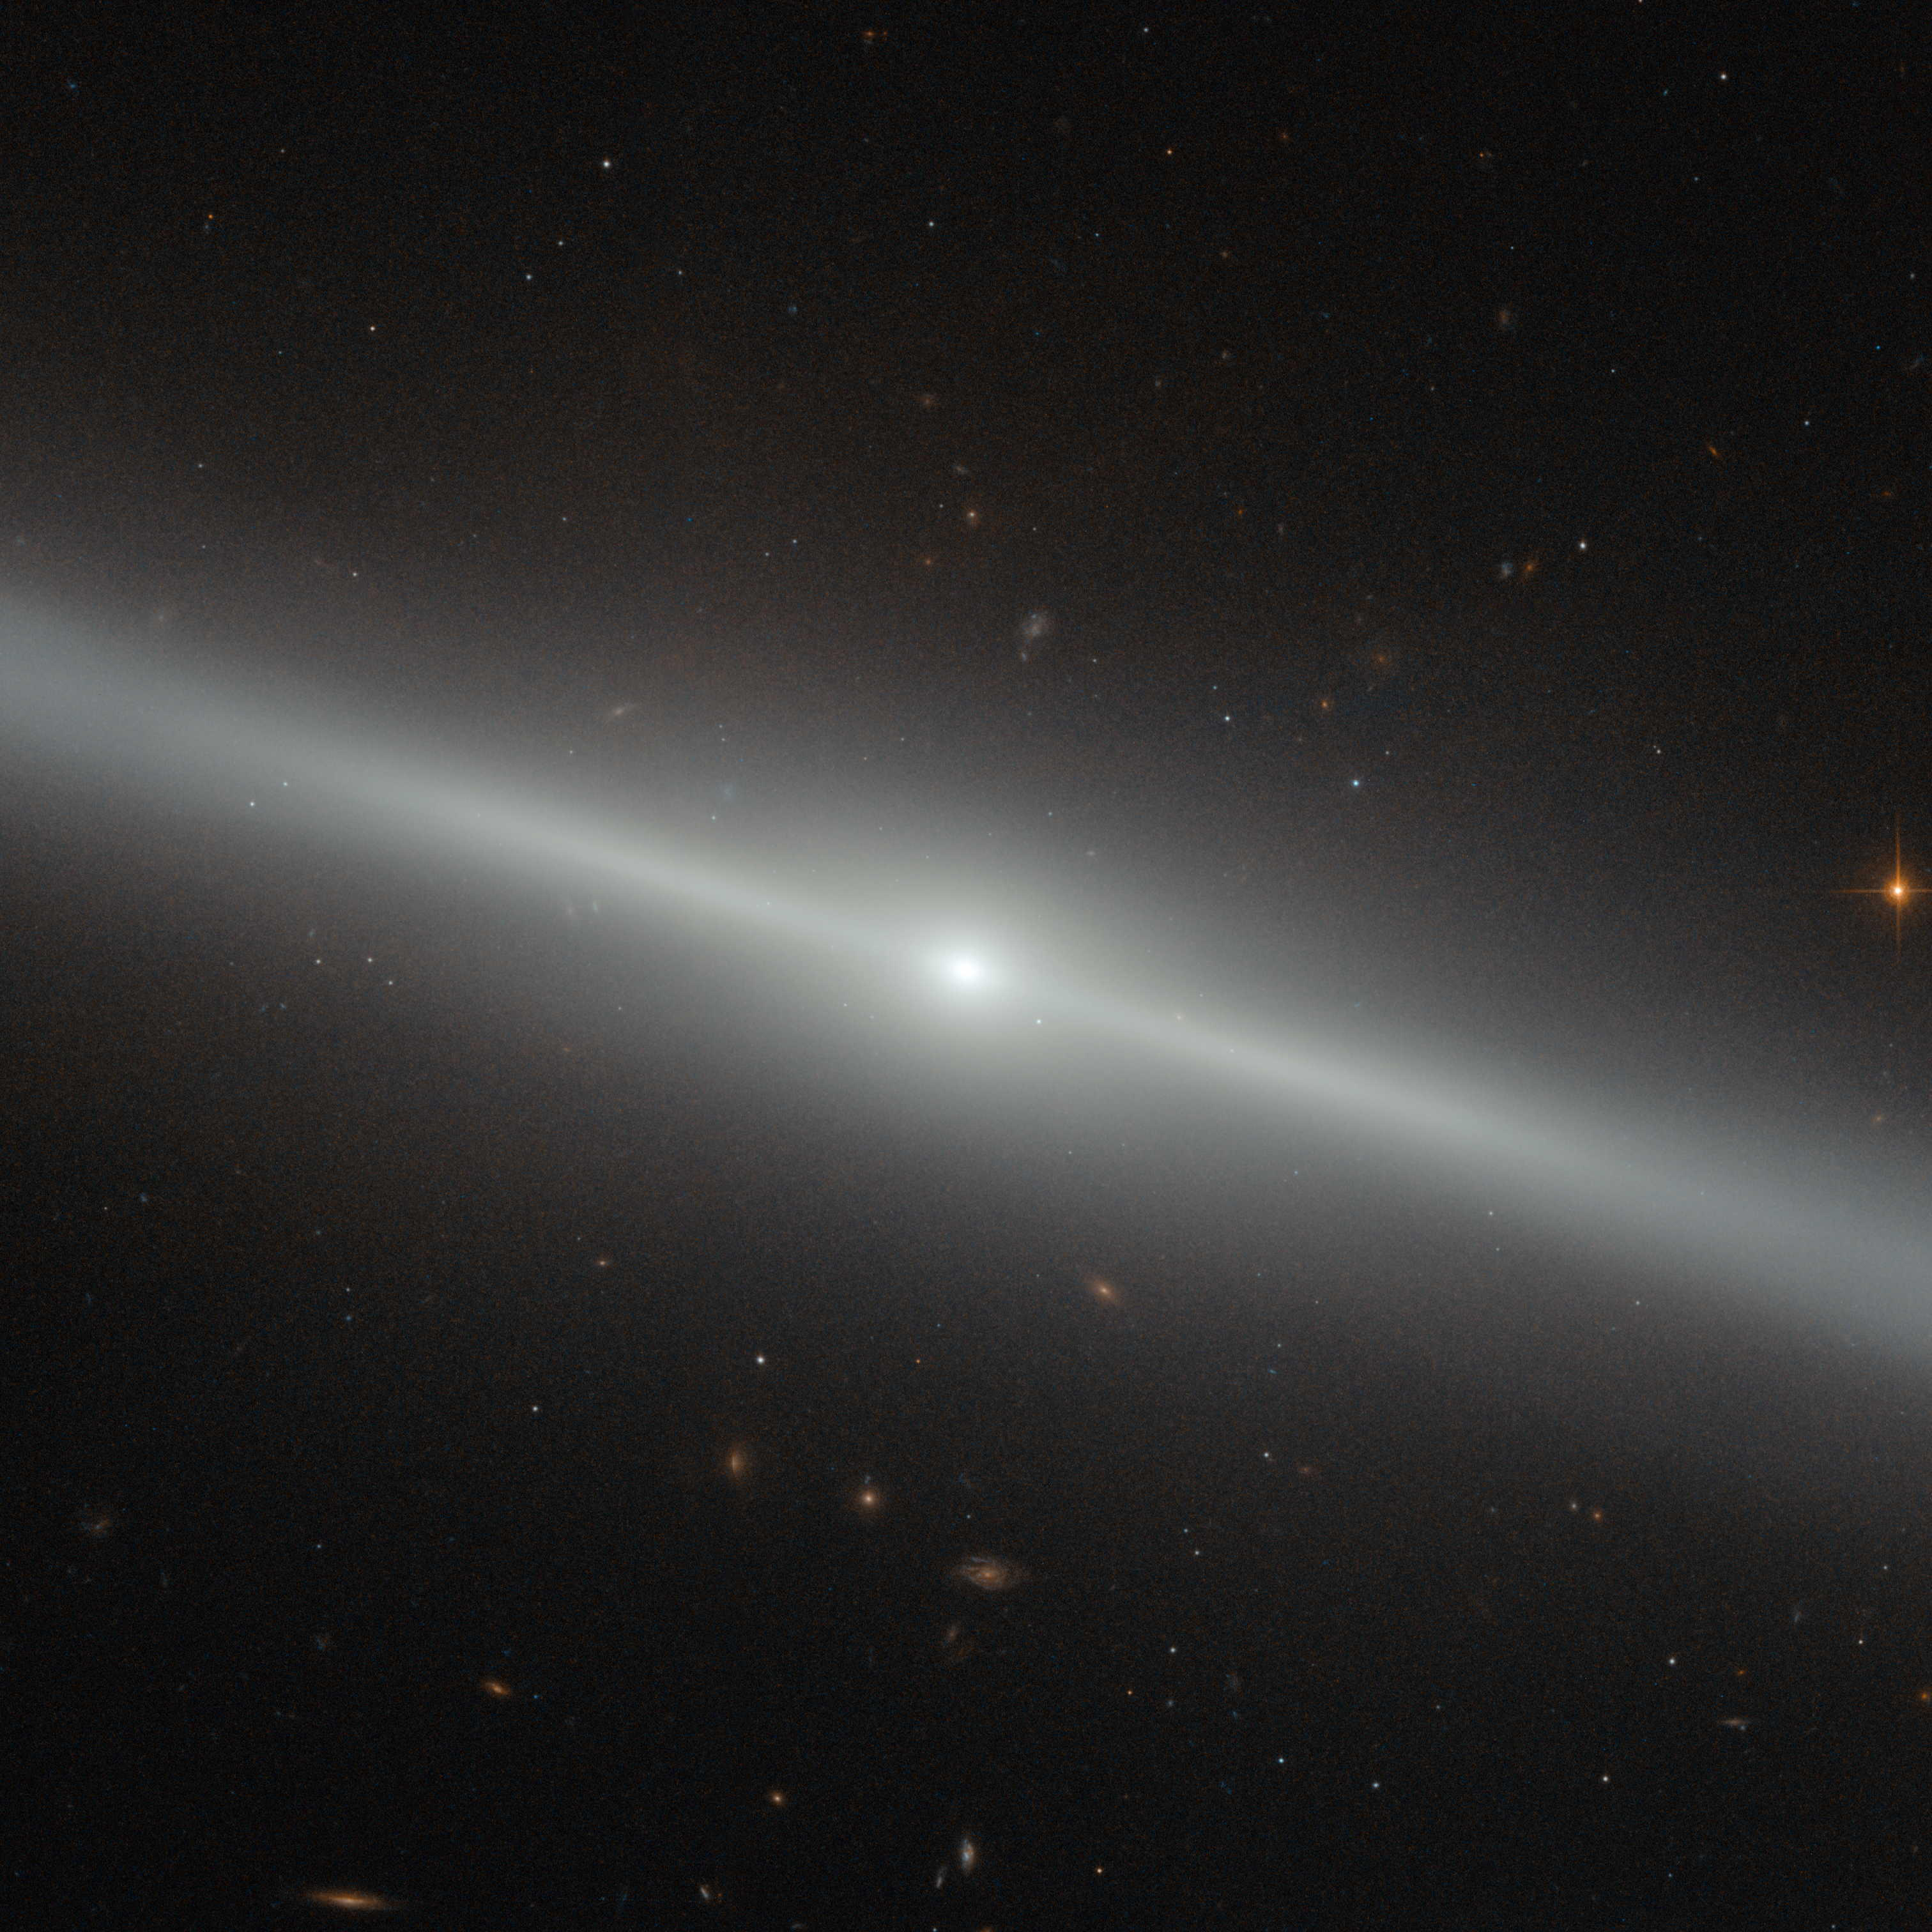

A galaxy on the edge

This spectacular image was captured by the NASA/ESA Hubble Space Telescope's Advanced Camera for Surveys (ACS). The bright streak slicing across the frame is an edge-on view of galaxy NGC 4762, and a number of other distant galaxies can be seen scattered in the background.

NGC 4762 lies about 58 million light-years away in the constellation of Virgo (The Virgin). It is part of the Virgo Cluster, hence its alternative designation of VCC 2095 for Virgo Cluster Catalogue entry. This catalogue is a listing of just over 2000 galaxies in the area of the Virgo Cluster. The Virgo Cluster is actually prominently situated, and lies at the centre of the larger Virgo supercluster, of which our galaxy group, the Local Group, is a member.

Previously thought to be a barred spiral galaxy, NGC 4762 has since been found to be a lenticular galaxy, a kind of intermediate step between an elliptical and a spiral. The edge-on view that we have of this particular galaxy makes it difficult to determine its true shape, but astronomers have found the galaxy to consist of four main components — a central bulge, a bar, a thick disc and an outer ring.

The galaxy's disc is asymmetric and warped, which could potentially be explained by NGC 4762 violently cannibalising a smaller galaxy in the past. The remains of this former companion may then have settled within NGC 4762's disc, redistributing the gas and stars and so changing the disc's morphology.

NGC 4762 also contains a Liner-type Active Galactic Nucleus, a highly energetic central region. This nucleus is detectable due to its particular spectral line emission, which acts as a type of "atomic fingerprint", allowing astronomers to measure the composition of the region.

Credit: ESA/Hubble & NASA